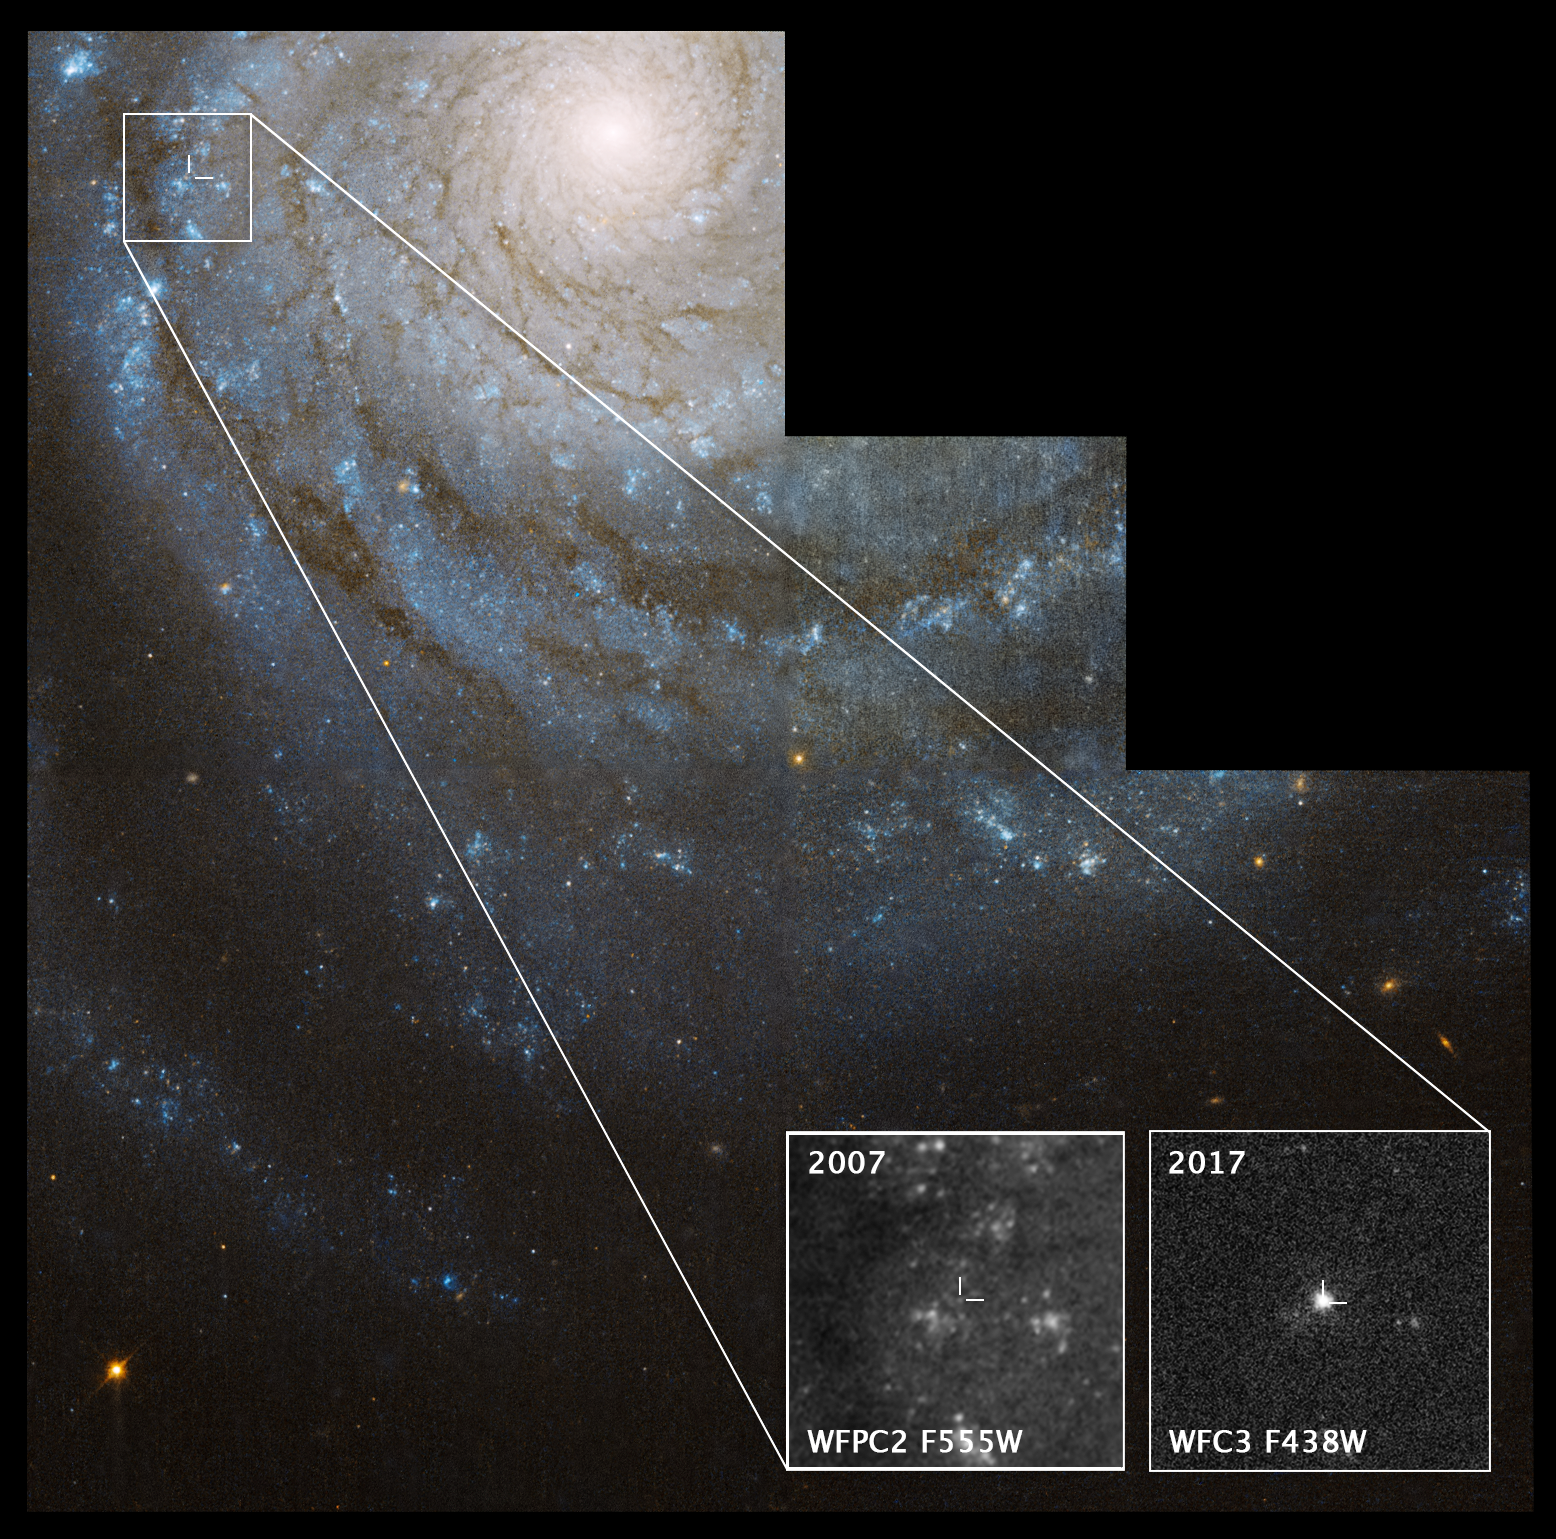

Astronomers find a supernova's progenitor star in Hubble images

This NASA/ESA Hubble Space Telescope image of the nearby spiral galaxy NGC 3938 shows the location of supernova 2017ein, in a spiral arm near the bright core. The exploded star is a Type Ic supernova, thought to detonate after its massive star has shed or been stripped of its outer layers of hydrogen and helium.

Progenitor stars to Type Ic supernovas have been hard to find. But astronomers sifting through Hubble archival images may have uncovered the star that detonated as supernova 2017ein. The location of the candidate progenitor star is shown in the pullout box at bottom left, taken in 2007. The bright object in the box at bottom right is a close-up image of the supernova, taken by Hubble in 2017, shortly after the stellar blast.

NGC 3938 resides 65 million light-years away in the constellation Ursa Major (the Great Bear). The Hubble image of NGC 3938 was taken in 2007.

Credit: NASA, ESA, S. Van Dyk (Caltech), and W. Li (University of California)